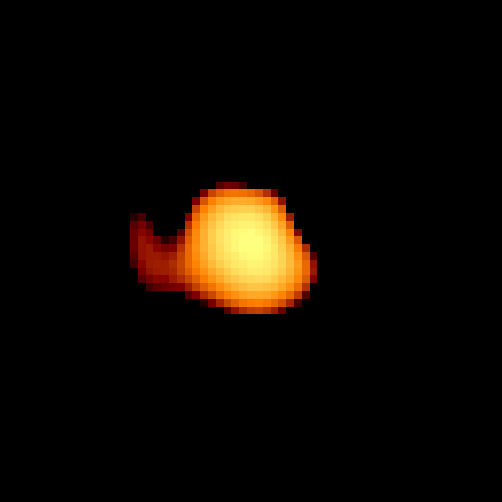

Omicron Ceti

In UV light, Hubble resolves a small hook-like appendage extending from Mira, in the direction of the companion that could be material from Mira being gravitationally drawn toward the smaller star.

Alternately, it could be that material in Mira's upper atmosphere is being heated due to the companion's presence.

Credit: Margarita Karovska (Harvard-Smithsonian Center for Astrophysics), and NASA/ESA